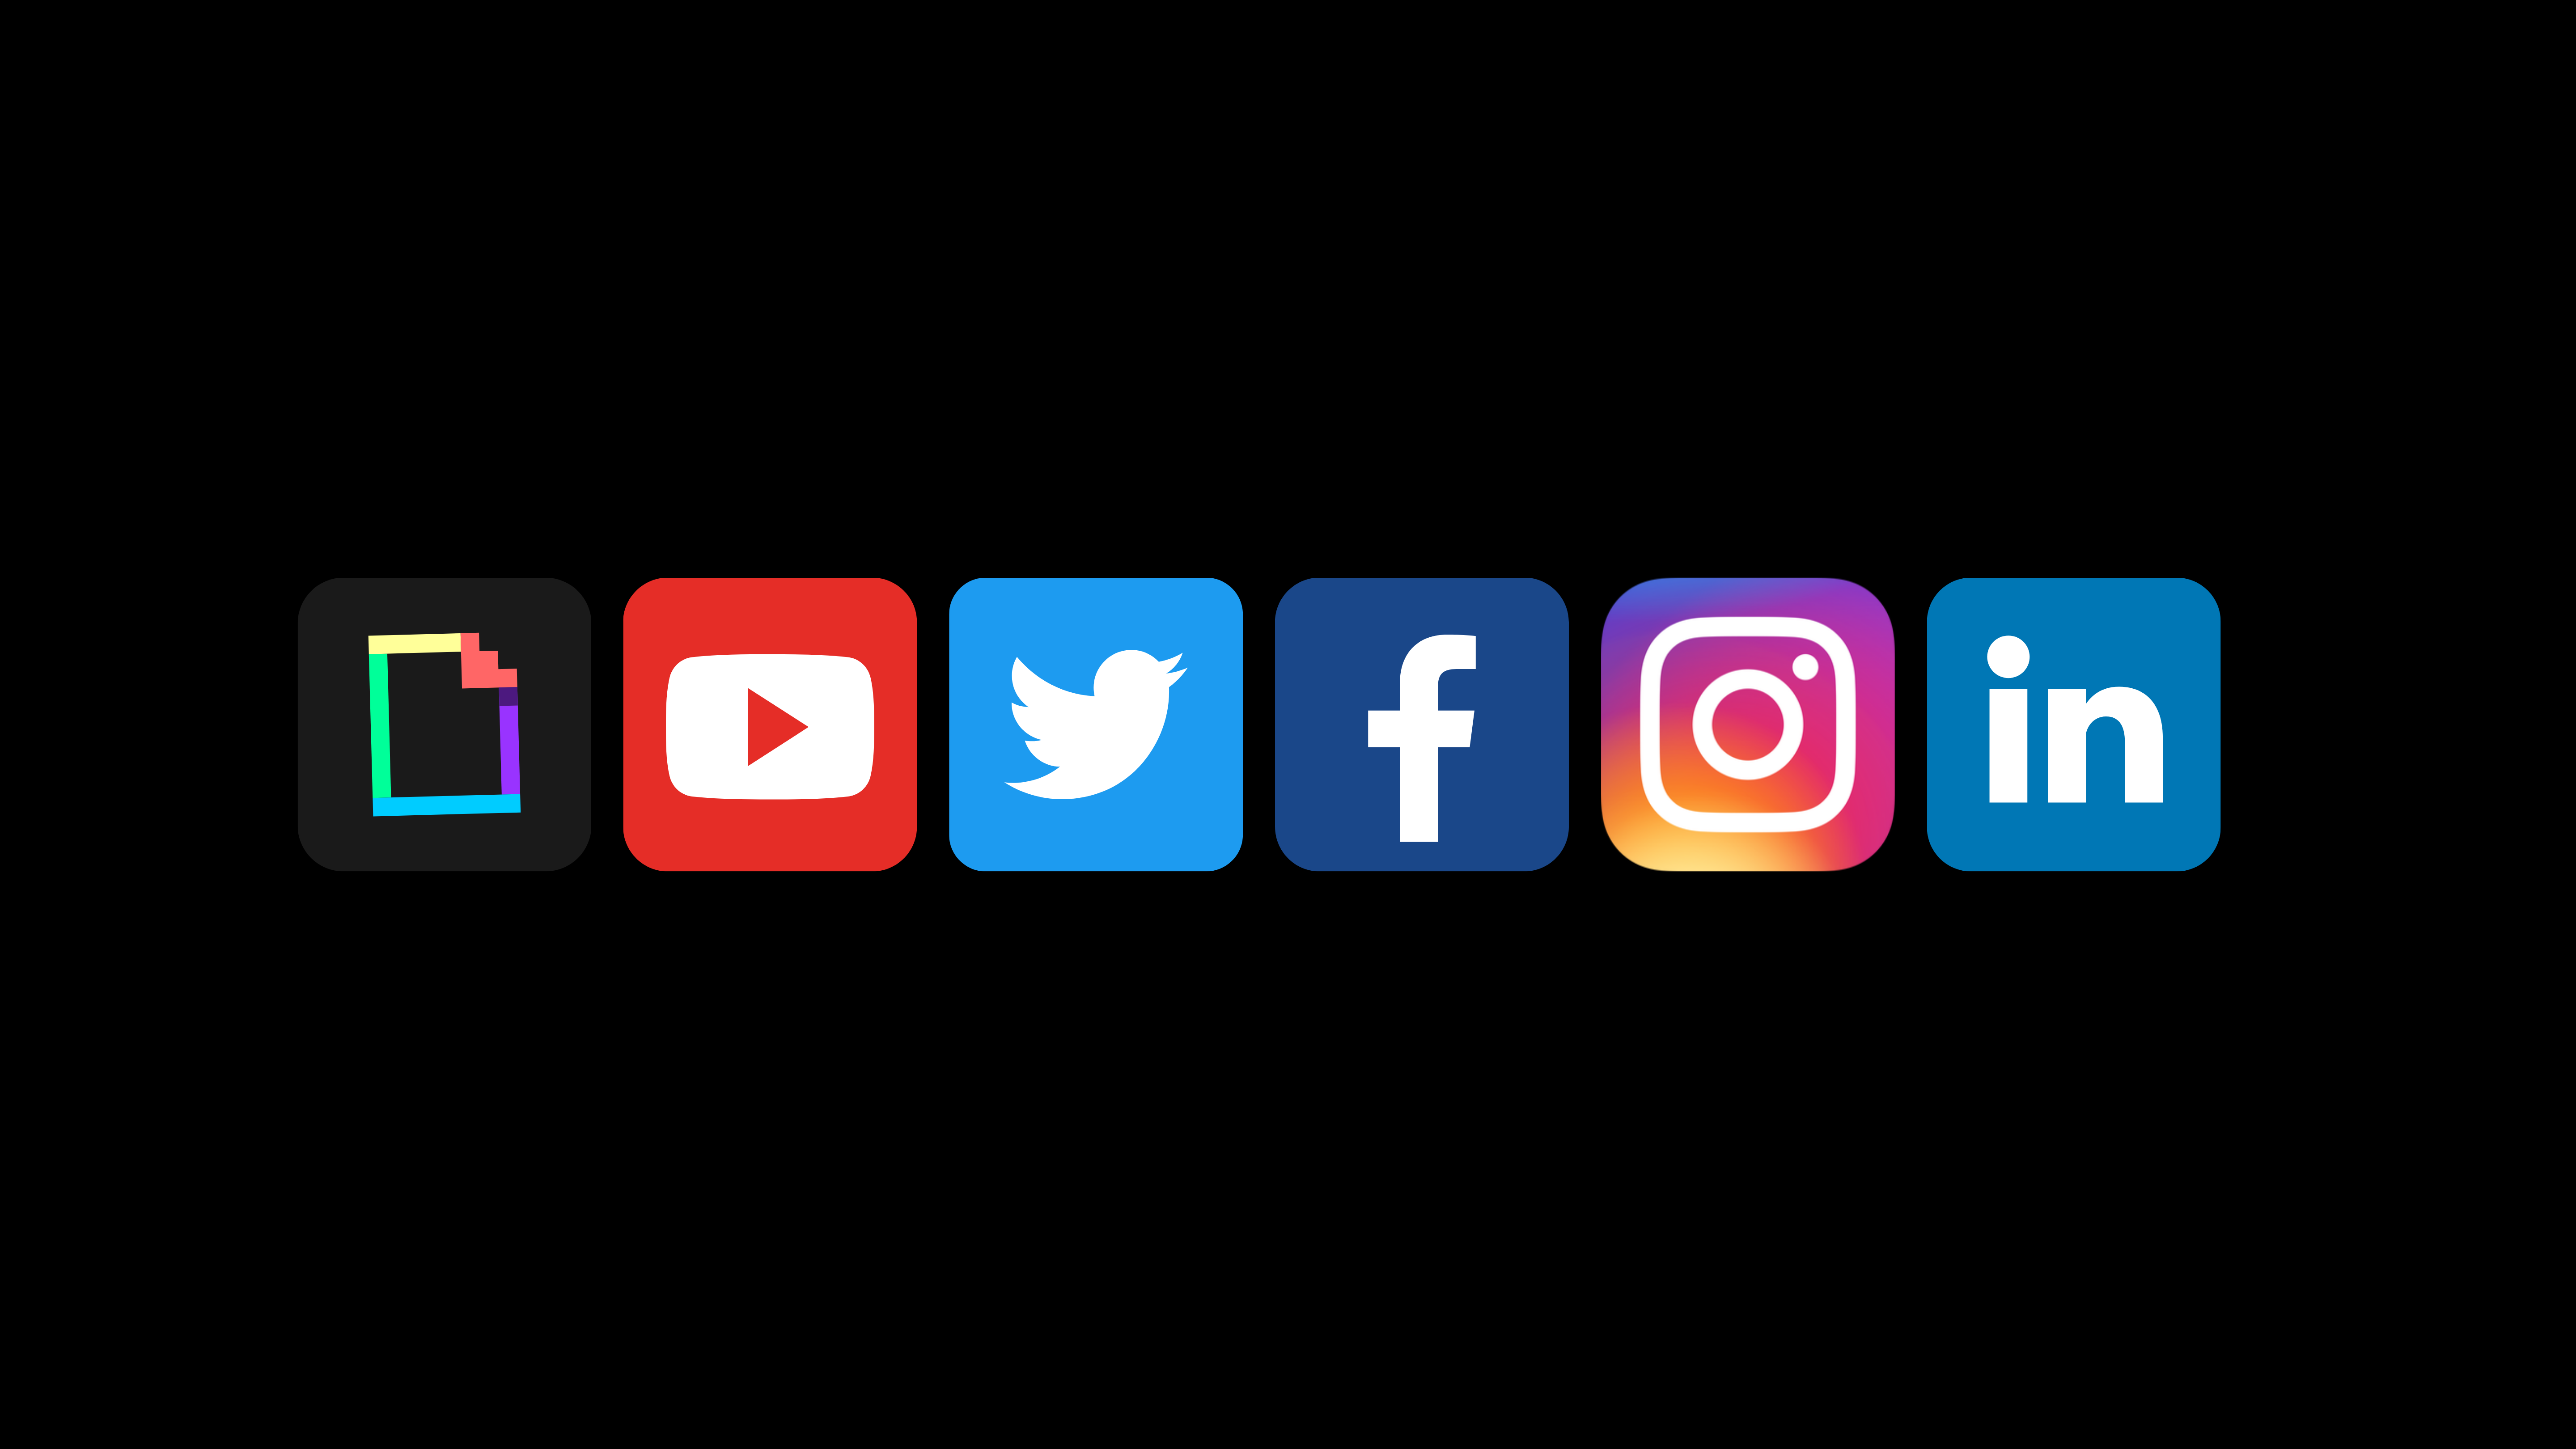

ESA/Webb Social Media Channels

ESA/Webb Social Media Channels

Credit: ESA/Webb